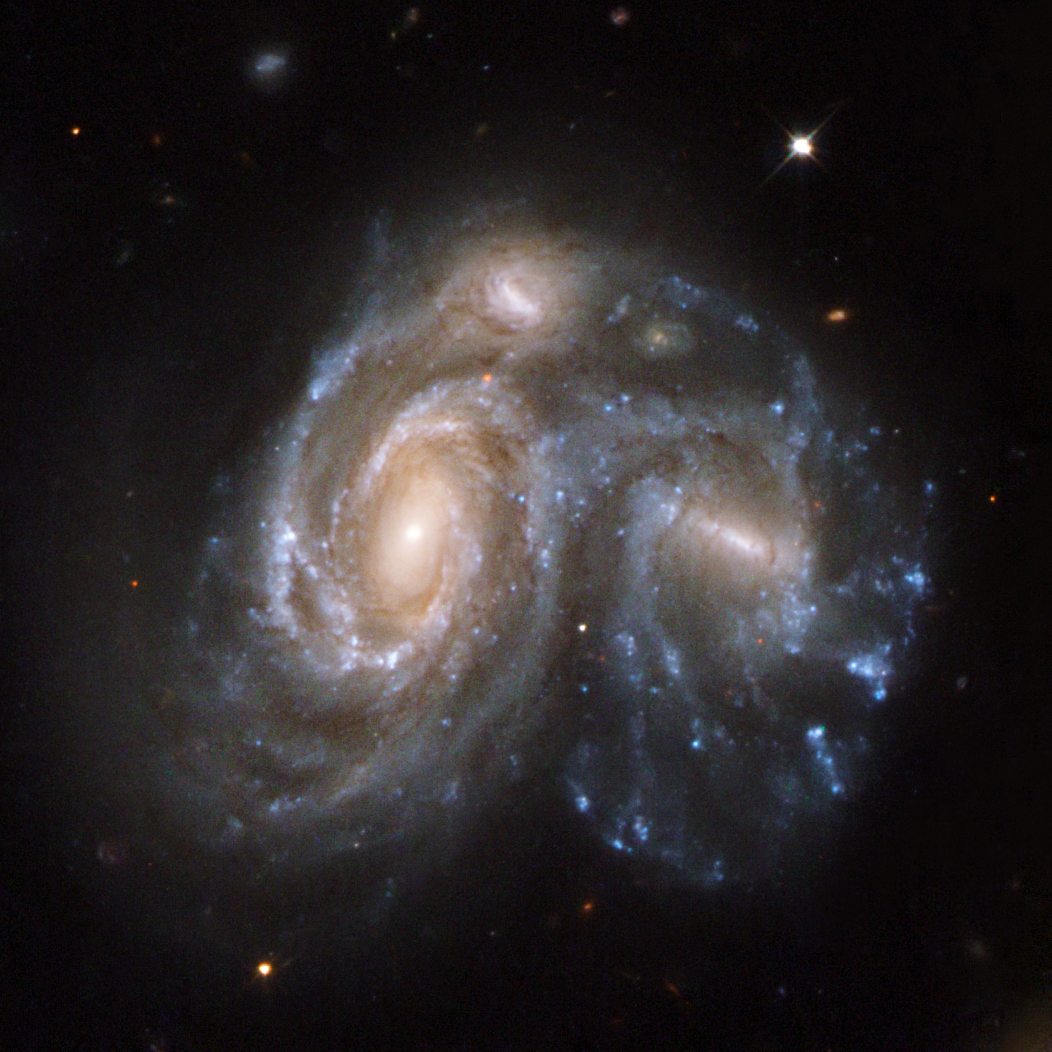

NGC 6050

Arp 272 is a remarkable collision between two spiral galaxies, NGC 6050 and IC 1179, and is part of the Hercules Galaxy Cluster, located in the constellation of Hercules. The galaxy cluster is part of the Great Wall of clusters and superclusters, the largest known structure in the Universe. The two spiral galaxies are linked by their swirling arms. Arp 272 is located some 450 million light-years away from Earth.

This image is part of a large collection of 59 images of merging galaxies taken by the Hubble Space Telescope and released on the occasion of its 18th anniversary on 24th April 2008.

Credit: NASA, ESA, the Hubble Heritage Team (STScI/AURA)-ESA/Hubble Collaboration and K. Noll (STScI)